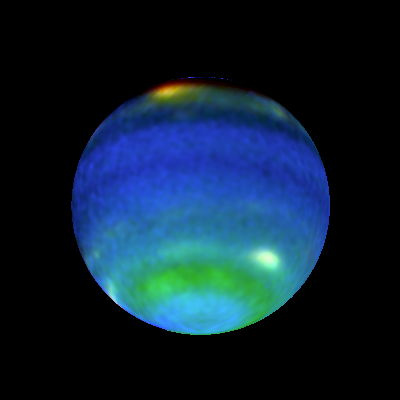

Opposite Hemispheres of Neptune

These views of Neptune, as seen through the Hubble Space Telescope, are helping planetary scientists gain some insight into the weird and wild weather that is a hallmark of the eighth planet from the sun. On Neptune, winds blow at 900 miles per hour (about 1450 kilometres per hour) and huge storms -- some the size of Earth itself -- come and go with regularity. How, precisely, Neptune's weather is driven is a mystery since the sun, which drives the Earth's weather, is 900 times dimmer there than on Earth. The bottom images show Neptune's Hubble portrait circa 1996. The top images were taken this year and help illustrate the dynamic weather features that dominate the planet.

Credit: Lawrence A. Sromovsky (University of Wisconsin-Madison) and NASA/ESA